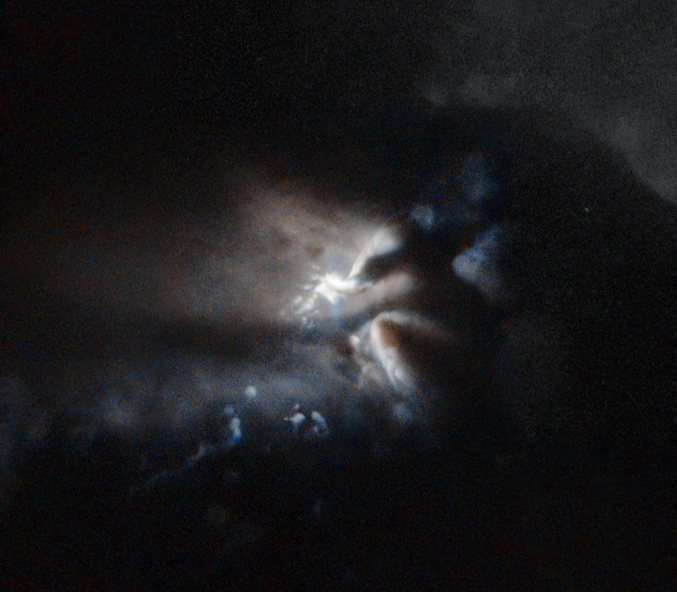

Sunset in Mordor

Don’t be fooled by the title; the mysterious, almost mystical bright light emerging from these thick, ominous clouds is actually a telltale sign of star formation. Here, a very young star is being born in the guts of the dark cloud LDN 43 — a massive blob of gas, dust, and ices, gathered 520 light-years from Earth in the constellation of Ophiuchus (The Serpent Bearer).

Stars are born from cosmic dust and gas, which floats freely in space until gravity forces it to bind together. The hidden newborn star in this image, revealed only by light reflected onto the plumes of the dark cloud, is named RNO 91. It is what astronomers call a pre-main sequence star, meaning that it has not yet started burning hydrogen in its core.

The energy that allows RNO 91 to shine comes from gravitational contraction. The star is being compressed by its own weight until, at some point, a critical mass will be reached and hydrogen, its main component, will begin to fuse together, releasing huge amounts of energy in the process. This will mark the beginning of adulthood for the star. But even before this happens the adolescent star is bright enough to shine and generate powerful stellar winds, emitting intense X-ray and radio emission.

RNO 91 is a variable star around half the mass of the Sun. Astronomers have been able to observe the existence of a dusty, icy disc surrounding it, stretching out to over 1700 times the distance from Earth to the Sun. It is believed that this disc may host protoplanets — planets in the process of being formed — and will eventually evolve into a fully-fledged planetary system.

This image is based on data gathered by the NASA/ESA Hubble Space Telescope. A version of this image was entered into the Hubble’s Hidden Treasures image processing competition by contestant Judy Schmidt.

Credit: ESA/Hubble & NASA Acknowledgement: Judy Schmidt